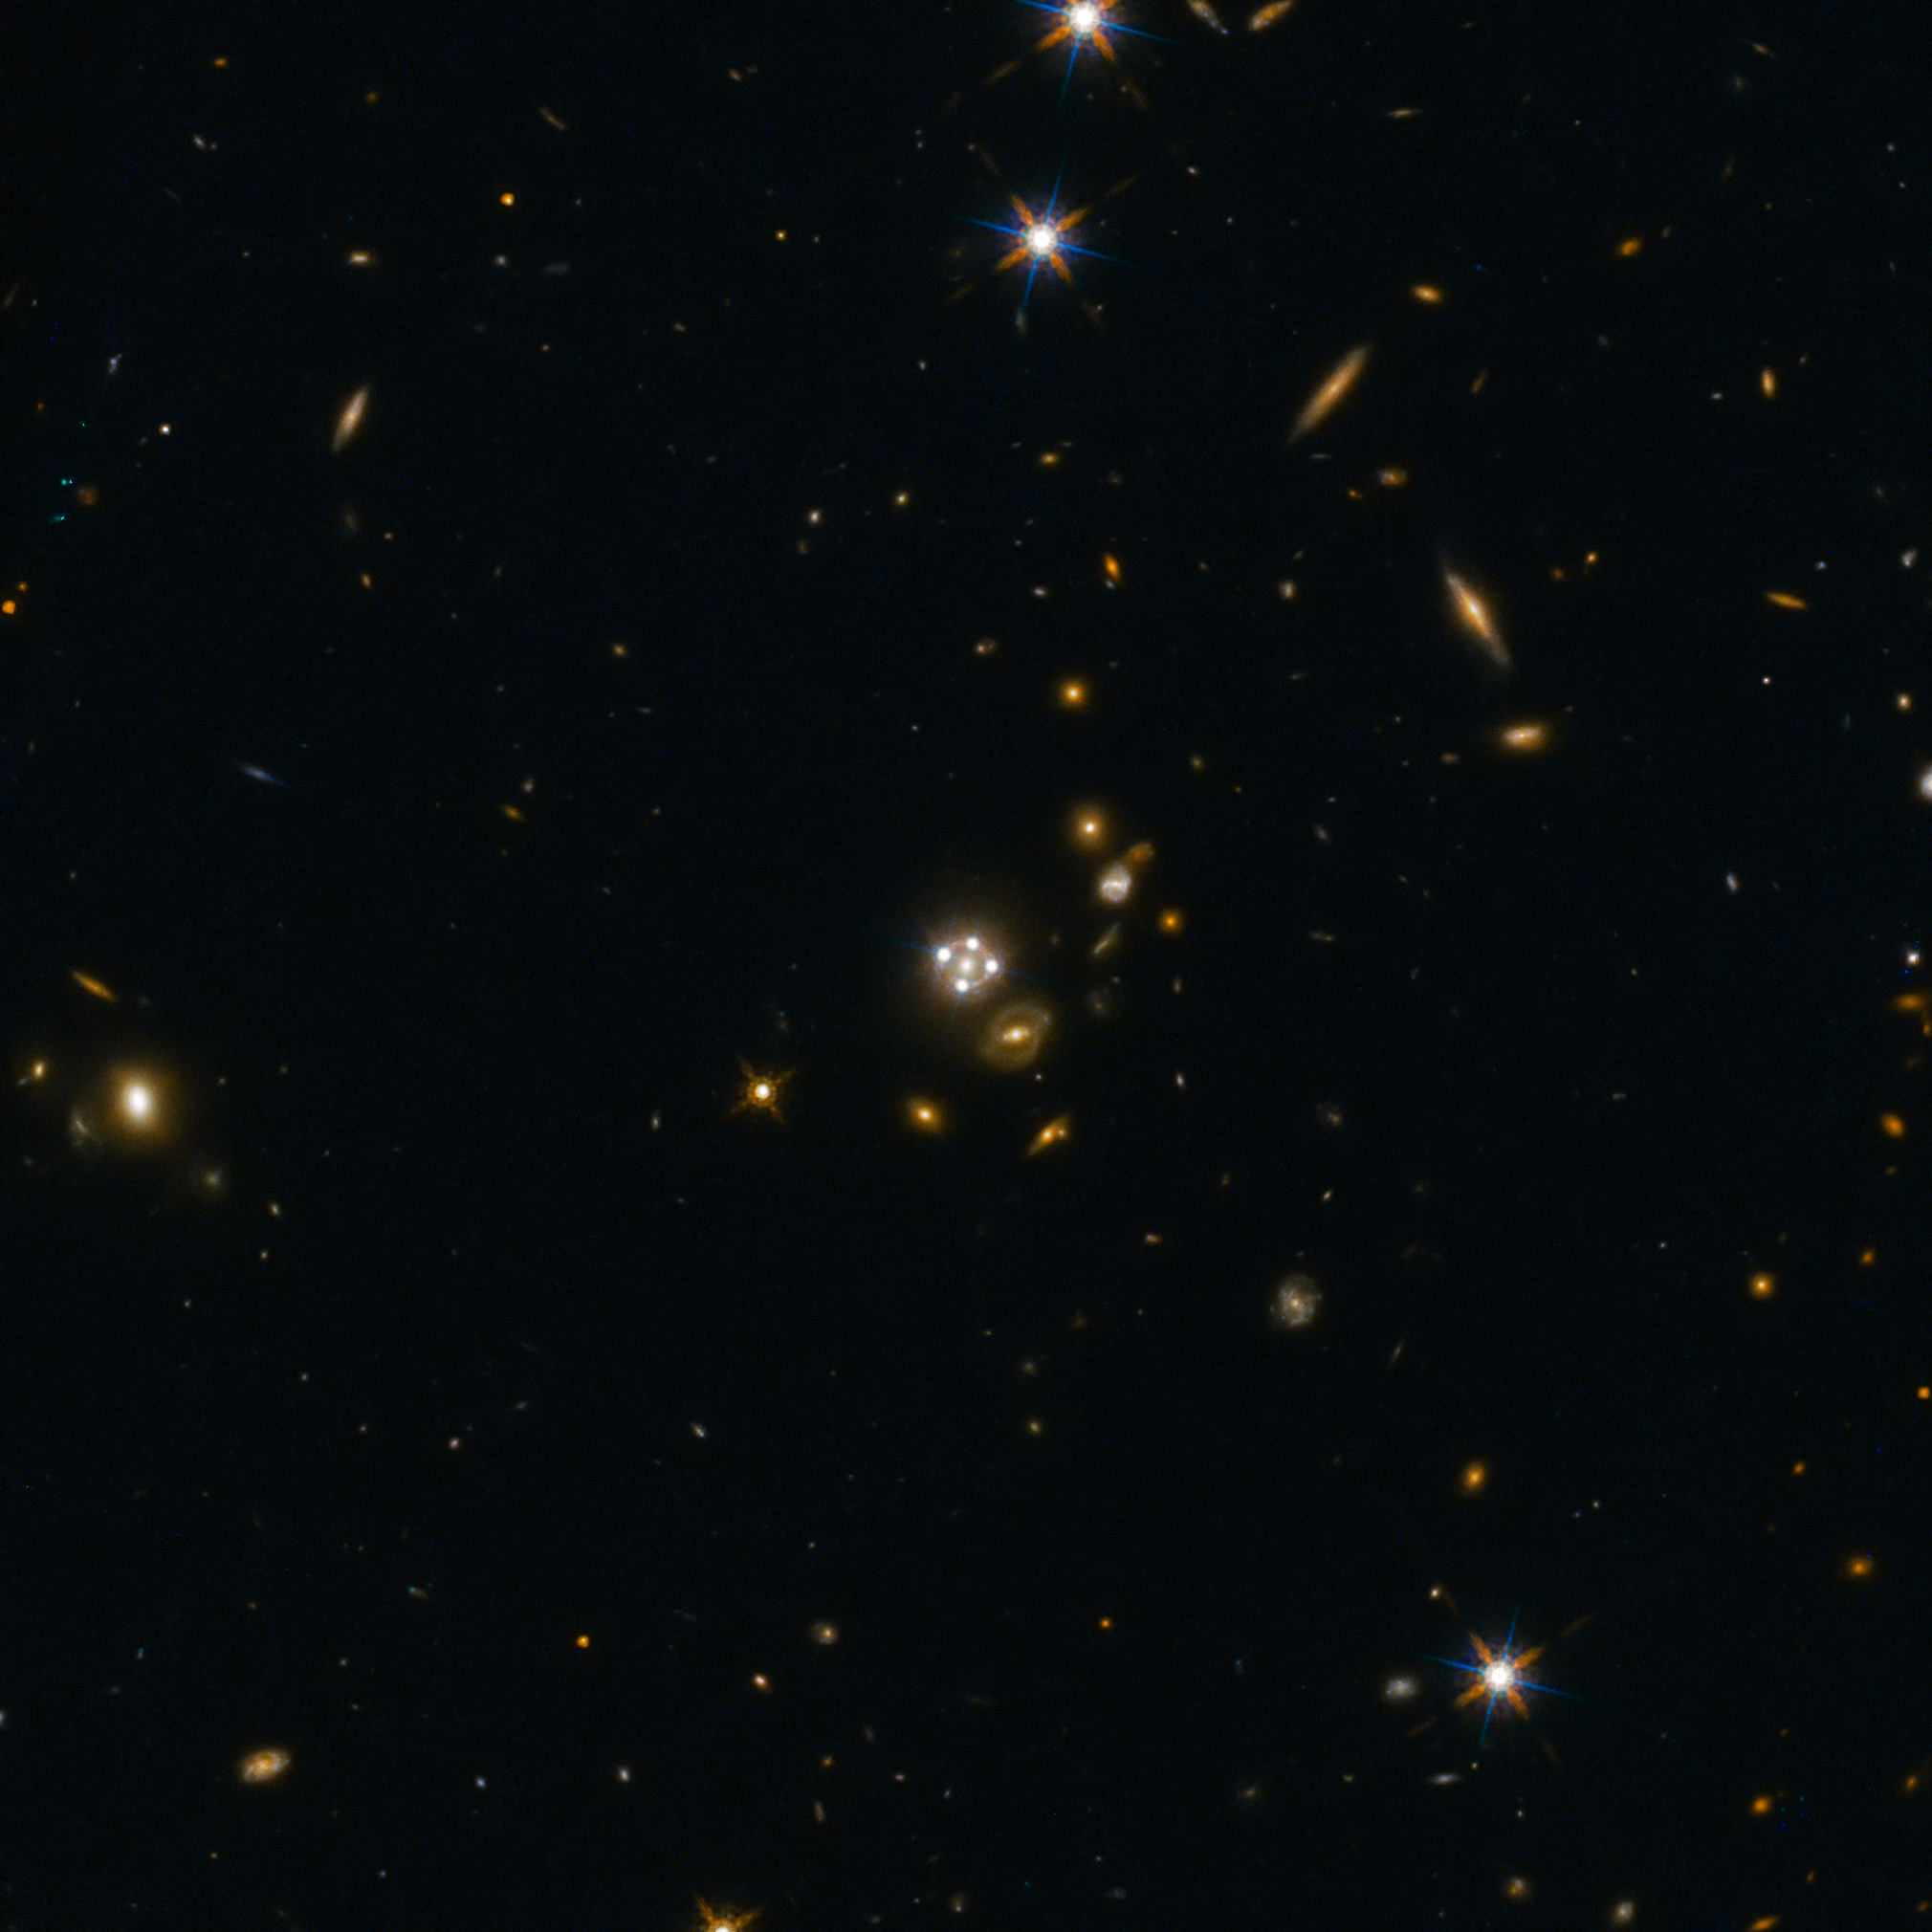

Lensed quasar and its surroundings

HE0435-1223, located in the centre of this wide-field image, is among the five best lensed quasars discovered to date. The foreground galaxy creates four almost evenly distributed images of the distant quasar around it.

Credit: ESA/Hubble, NASA, Suyu et al.